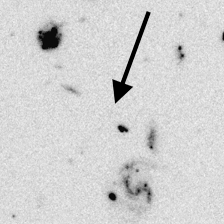

Distant Galaxy in the Hubble Deep Field

Series of four panels that illustrate the distant-galaxy identification technique. The F450W filter has been used to obtain this image.

Credit: Ken Lanzetta and Amos Yahil (State University of New York at Stony Brook), and NASA/ESA